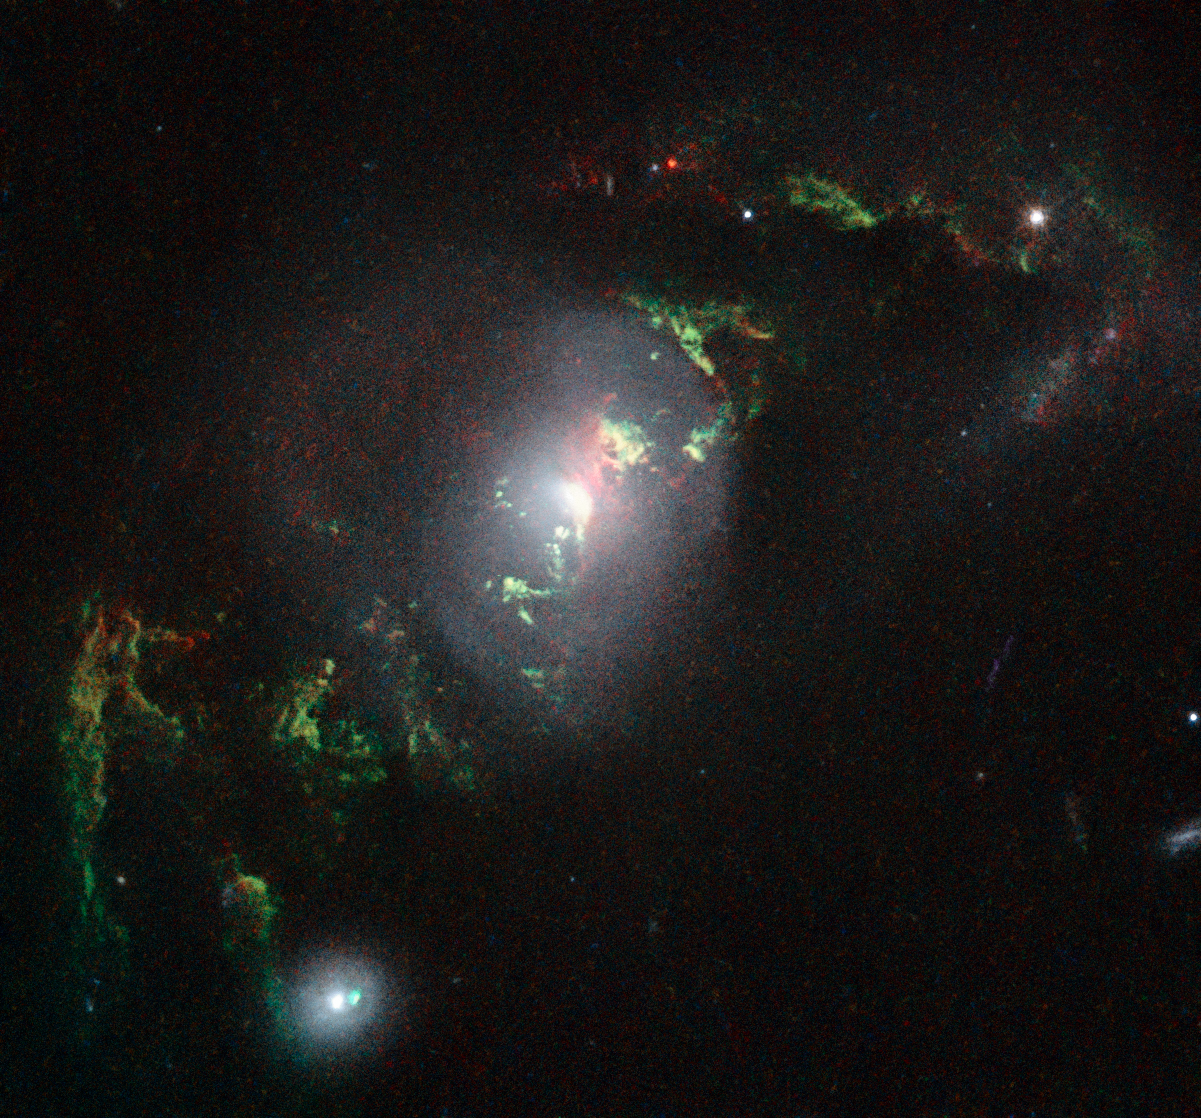

Hubble view of green filament in galaxy UGC 7342

This new NASA/ESA Hubble Space Telescope image shows ghostly green filaments, lying within galaxy UGC 7342. This filament was illuminated by a blast of radiation from a quasar — a very luminous and compact region that surrounds the supermassive black hole at the centre of its host galaxy.

Its bright green hue is a result of ionised oxygen, which glows brightly at green wavelengths.

Credit: NASA, ESA, W. Keel (University of Alabama, USA)